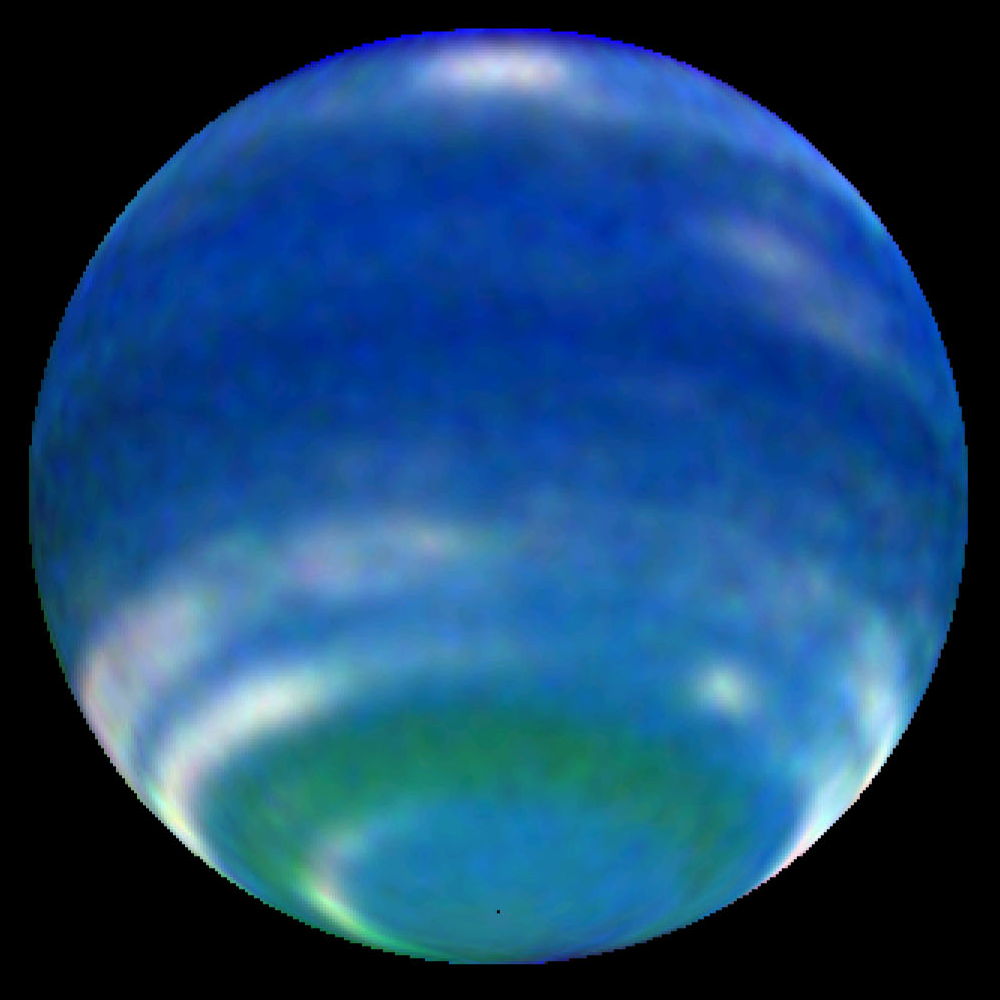

Springtime on Neptune - 2002 Image of Neptune

Springtime is blooming on Neptune! This might sound like an oxymoron because Neptune is the farthest and coldest of the major planets. But observations by NASA's Hubble Space Telescope reveal an increase in Neptune's brightness in the southern hemisphere. Astronomers consider this increase a harbinger of seasonal change.

Credit: NASA/ESA, L. Sromovsky, and P. Fry (University of Wisconsin-Madison)